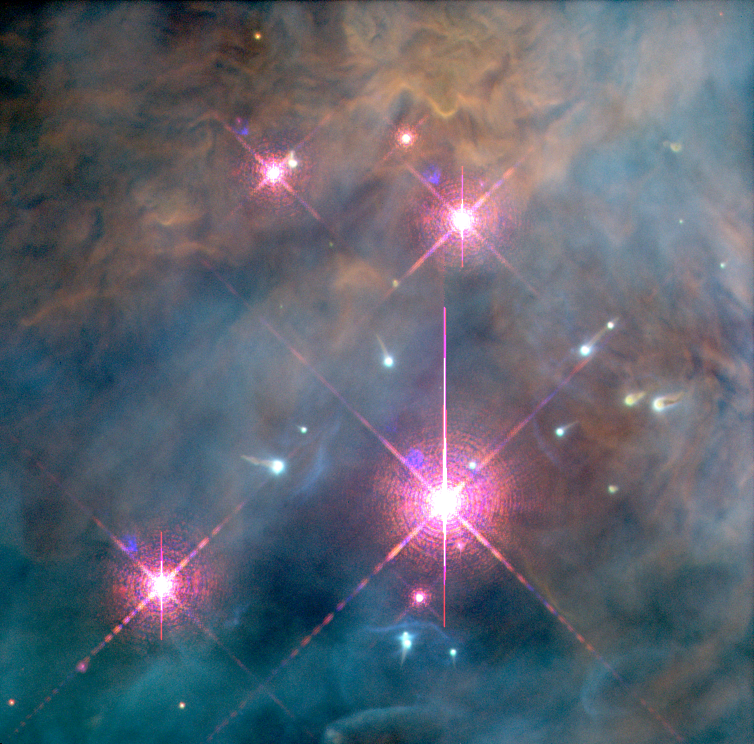

Starbirth

This picture, an assembly of individual images taken by NASA's Hubble Space Telescope, shows young stars at the center the Orion nebula. The seemingly infinite tapestry of rich detail revealed by Hubble shows a churning turbulent star factory set within a maelstrom of flowing, luminescent gas.

Located 1,500 light-years away, along our spiral arm of the Milky Way, the Orion nebula is located in the middle of the sword region of the constellation Orion the Hunter, which dominates the early winter evening sky, at northern latitudes. The stars have formed from collapsing clouds of interstellar gas within the last million years. The most massive clouds have formed the brightest stars near the center and these are so hot that they illuminate the gas left behind after the period of star formation was complete. The more numerous faint stars are still in the process of collapsing under their own gravity, but have become hot enough in their centers to be self luminous bodies.

Credit: NASA, C.R. O'Dell and S.K. Wong (Rice University)